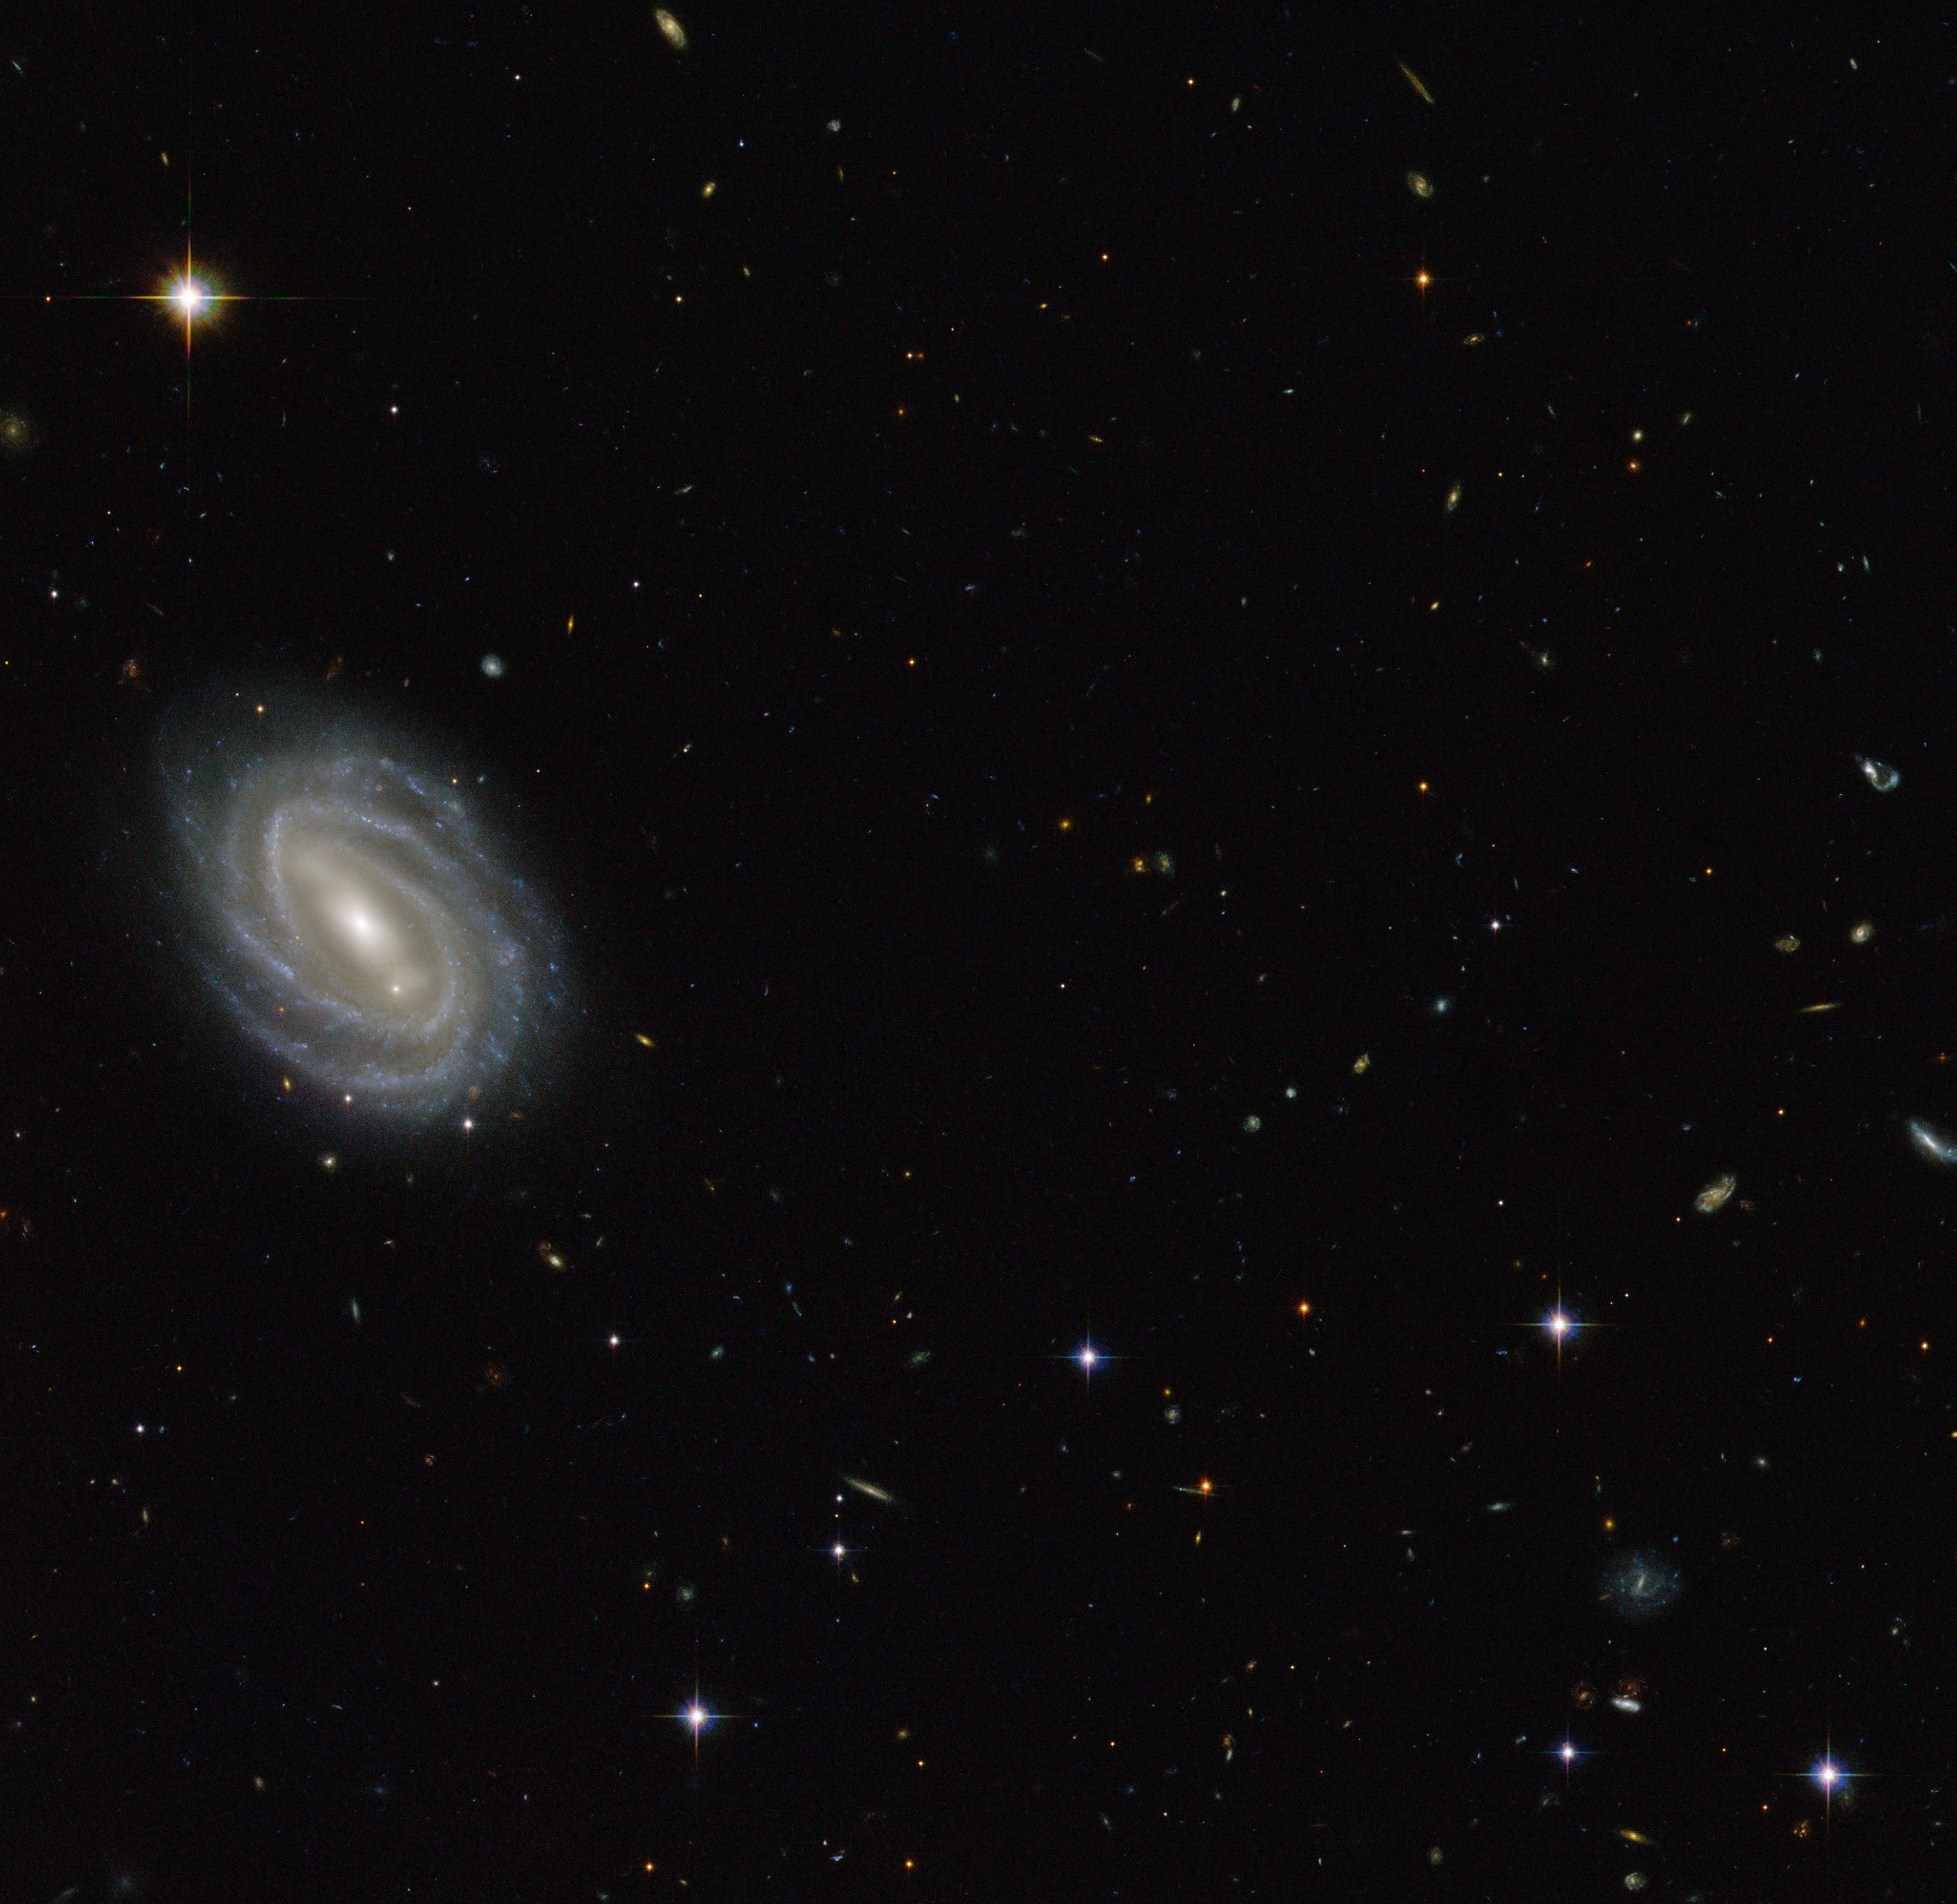

Spiral in Serpens

This new NASA/ESA Hubble Space Telescope image shows a beautiful spiral galaxy known as PGC 54493, located in the constellation of Serpens (The Serpent). This galaxy is part of a galaxy cluster that has been studied by astronomers exploring an intriguing phenomenon known as weak gravitational lensing.

This effect, caused by the uneven distribution of matter (including dark matter) throughout the Universe, has been explored via surveys such as the Hubble Medium Deep Survey. Dark matter is one of the great mysteries in cosmology. It behaves very differently from ordinary matter as it does not emit or absorb light or other forms of electromagnetic energy — hence the term "dark".

Even though we cannot observe dark matter directly, we know it exists. One prominent piece of evidence for the existence of this mysterious matter is known as the "galaxy rotation problem". Galaxies rotate at such speeds and in such a way that ordinary matter alone — the stuff we see — would not be able to hold them together. The amount of mass that is "missing" visibly is dark matter, which is thought to make up some 27% of the total contents of the Universe, with dark energy and normal matter making up the rest. PGC 55493 has been studied in connection with an effect known as cosmic shearing. This is a weak gravitational lensing effect that creates tiny distortions in images of distant galaxies.

A version of this image was entered into the Hubble's Hidden Treasures image processing competition by contestant Judy Schmidt.

Credit: ESA/Hubble & NASA Acknowledgement: Judy Schmidt (geckzilla.com)